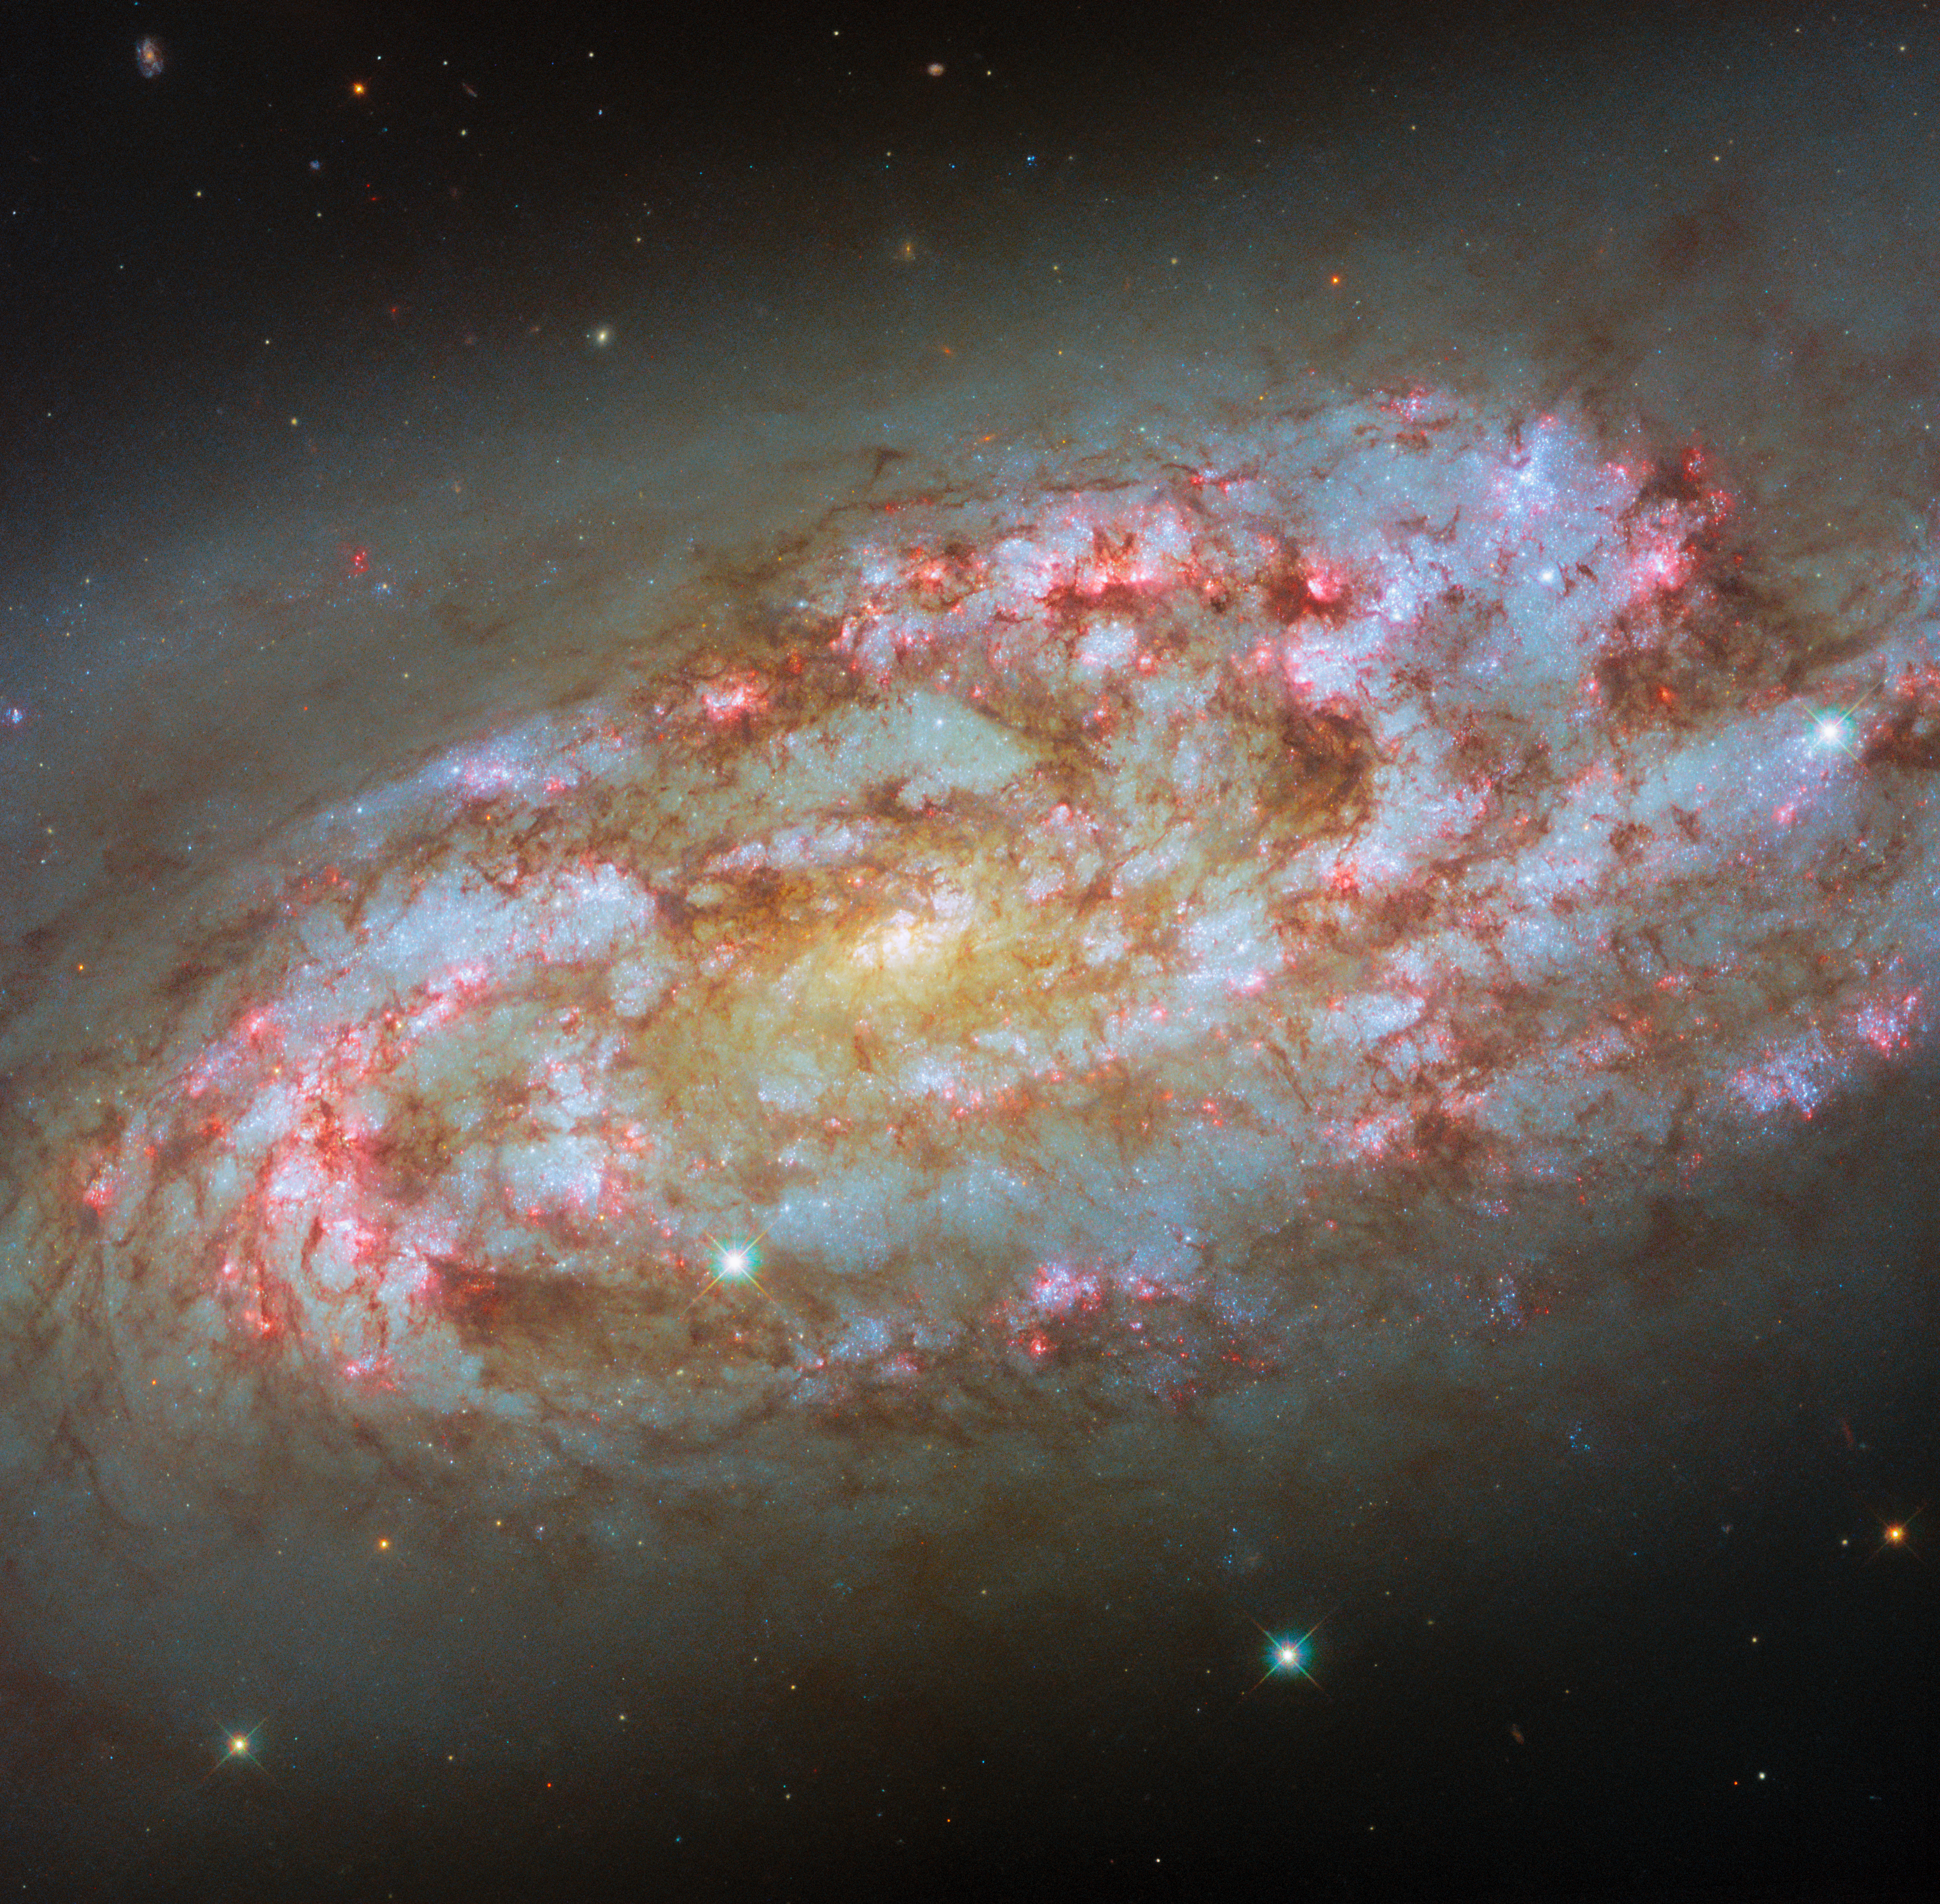

A storm of new stars

The subject of the latest Hubble Picture of the Week is a stormy and highly active spiral galaxy named NGC 1792. Located over 50 million light-years from Earth in the constellation Columba (the Dove), the bright glow of the galaxy’s centre is offset by the flocculent and sparkling spiral arms swirling around it.

NGC 1792 is just as fascinating to astronomers as its chaotic look might imply. Classified as a starburst galaxy, it is a powerhouse of star formation, with spiral arms rich in star-forming regions. In fact, it is surprisingly luminous for its mass. The galaxy is close to a larger neighbour, NGC 1808, and the strong gravitational interaction between the two is believed to be what has stirred up the reserves of gas in this galaxy. The result is a torrent of star formation, concentrated on the side where gravity has a stronger effect. It’s a perfect target for astronomers seeking to understand the complex interactions between gas, star clusters and supernovae in galaxies.

Hubble has shown off this galaxy before, in 2020. This week’s new image includes additional data collected throughout 2025, providing a deeper view of the tumultuous astrophysical activity taking place in the galaxy. Blossoming red lights in the arms mark out so-called H-alpha emission from dense clouds of hydrogen molecules. Stars form within these clouds and shine powerfully with ultraviolet radiation. They ionise the gas around them, causing the gas to emit a very particular red wavelength of light — a tell-tale sign of new stars.

Credit: ESA/Hubble & NASA, D. Thilker, F. Belfiore, J. Lee and the PHANGS-HST Team